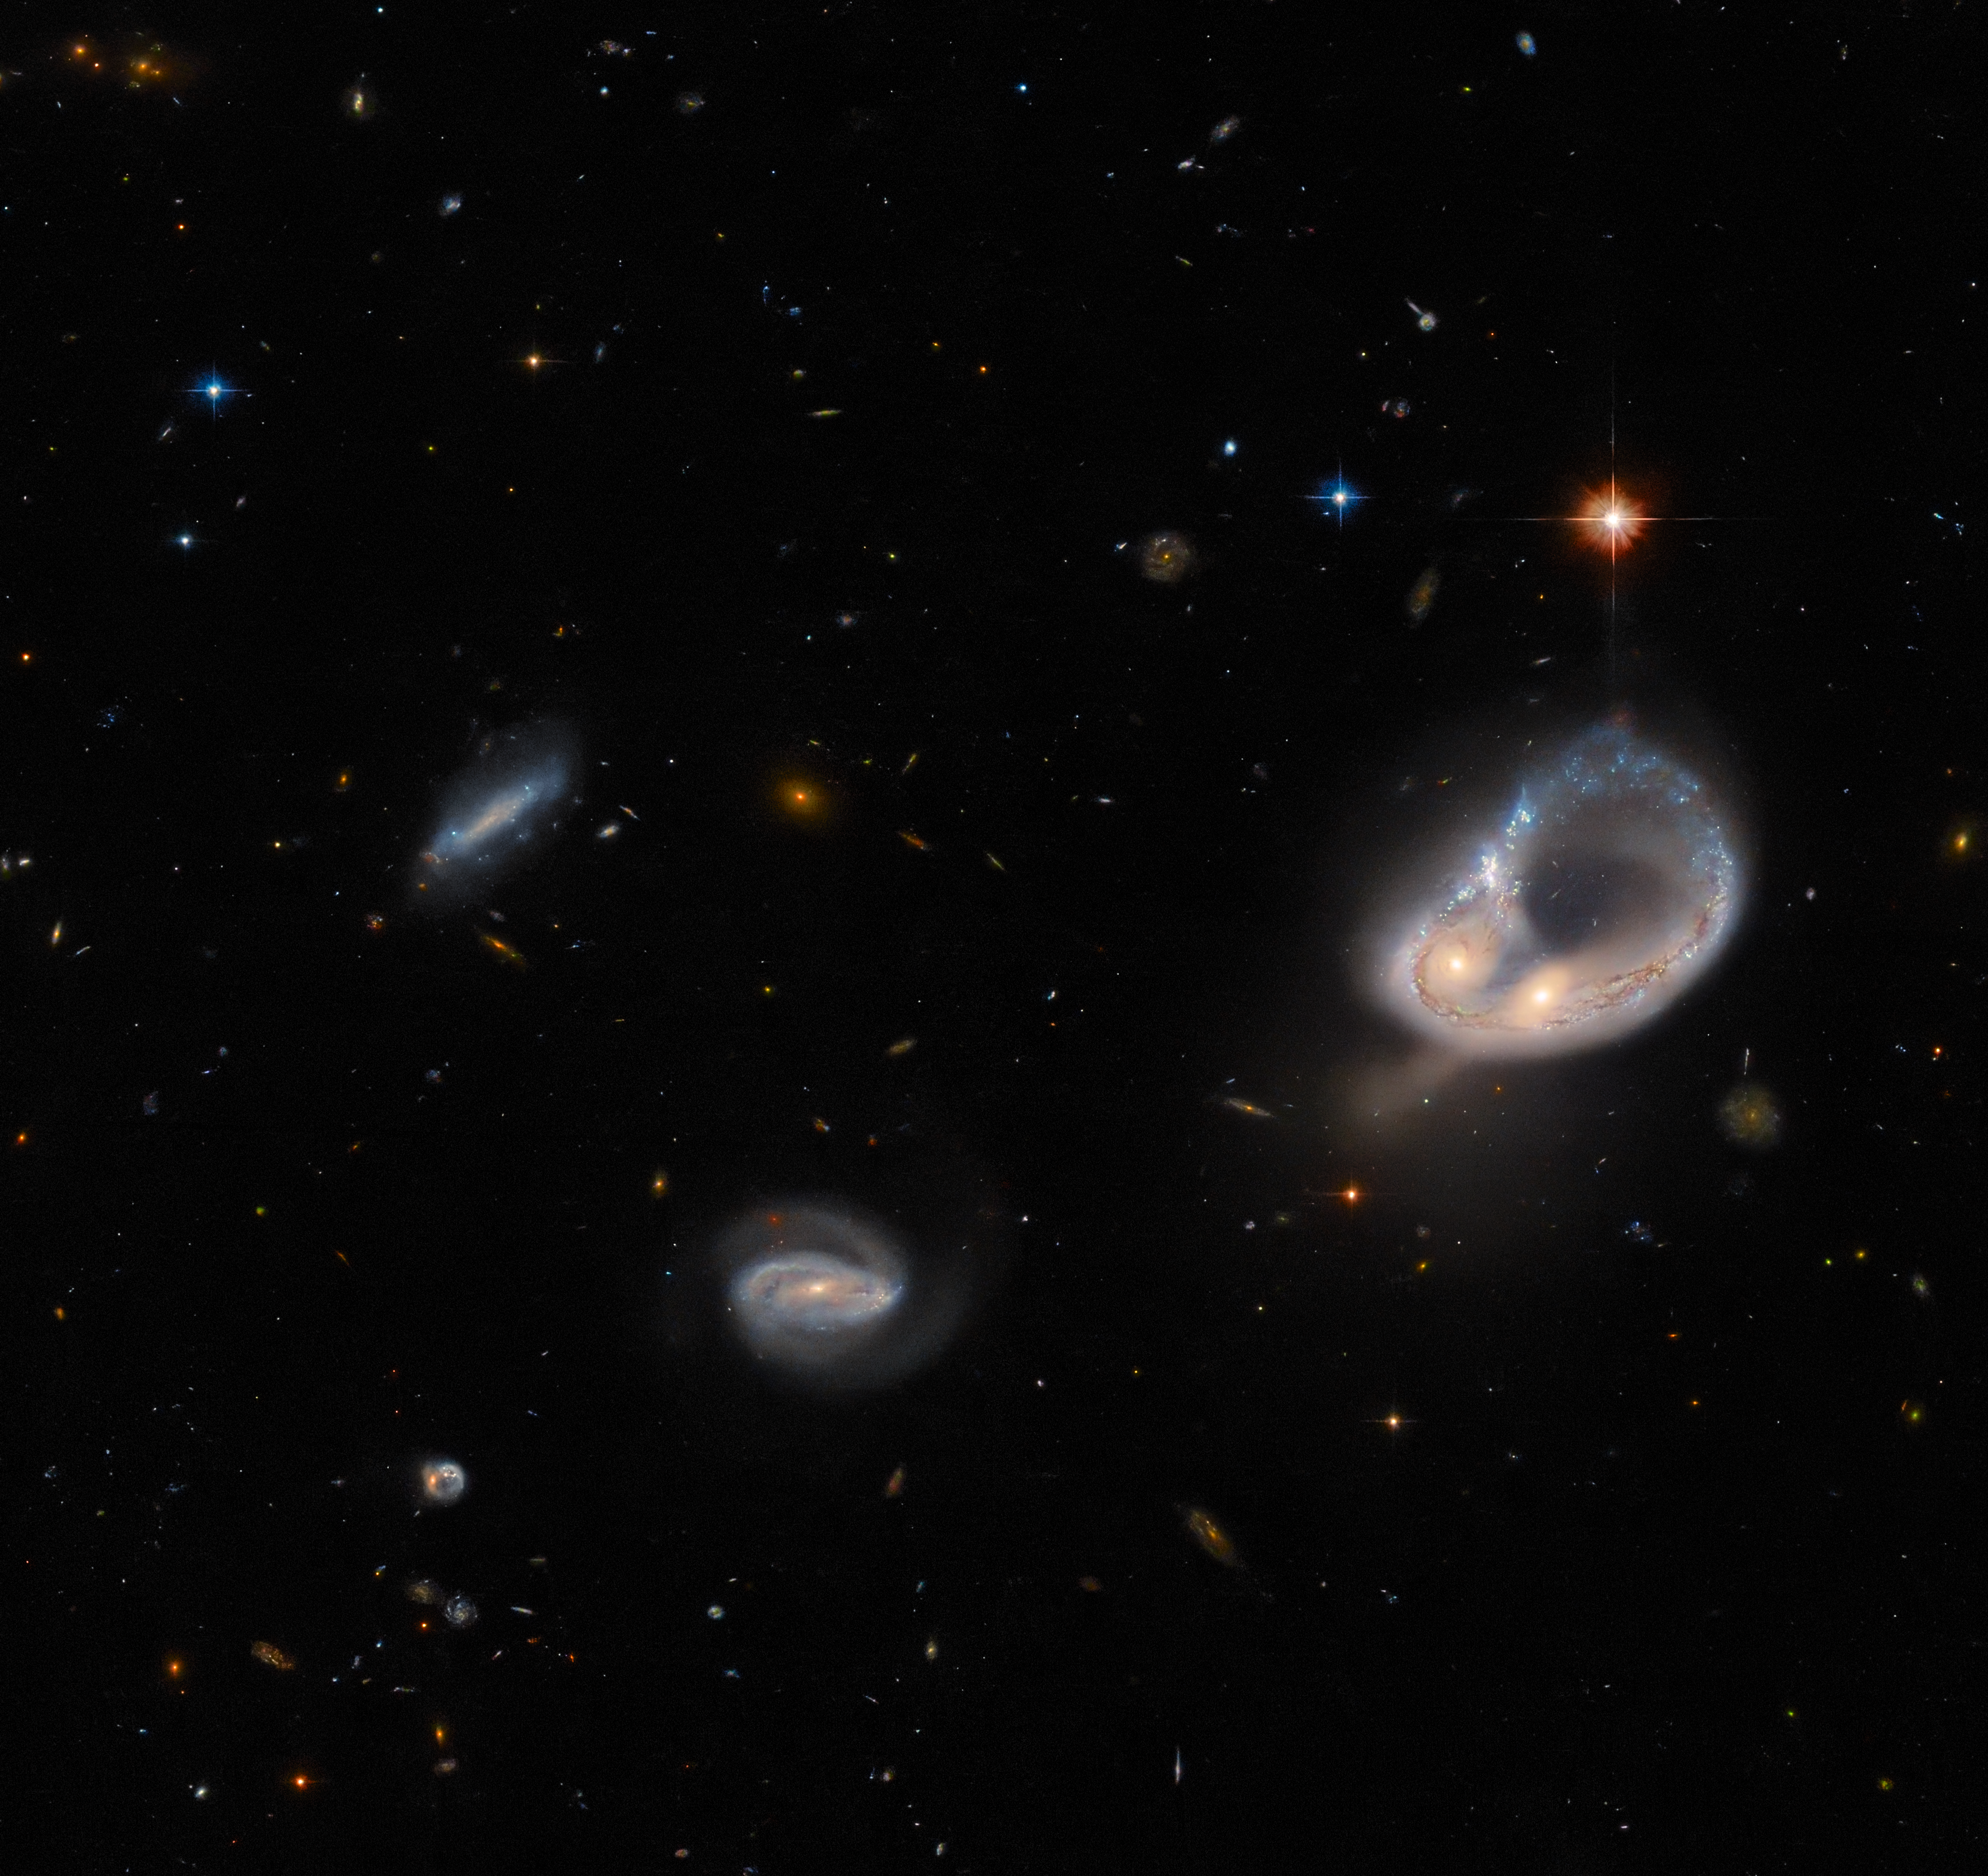

Hubble Hunts an Unusual Galaxy

The galaxy merger Arp-Madore 417-391 steals the spotlight in this image from the NASA/ESA Hubble Space Telescope. The Arp-Madore catalogue is a collection of particularly peculiar galaxies spread throughout the southern sky, and includes a collection of subtly interacting galaxies as well as more spectacular colliding galaxies. Arp-Madore 417-391, which lies around 670 million light-years away in the constellation Eridanus in the southern celestial hemisphere, is one such galactic collision. The two galaxies have been distorted by gravity and twisted into a colossal ring, leaving the cores of the two galaxies nestled side by side.

Hubble used its Advanced Camera for Surveys (ACS) to capture this scene — the instrument is optimised to hunt for galaxies and galaxy clusters in the ancient Universe. Hubble’s ACS has been contributing to scientific discovery for 20 years, and throughout its lifetime it has been involved in everything from mapping the distribution of dark matter to studying the evolution of galaxy clusters.

This image comes from a selection of Hubble observations designed to create a list of intriguing targets for follow-up observations with the NASA/ESA/CSA James Webb Space Telescope, as well as other ground-based telescopes. Astronomers chose a list of previously unobserved galaxies for Hubble to inspect between other scheduled observations. Over time, this lets astronomers build up a menagerie of interesting galaxies while using Hubble’s limited observing time as fully as possible.

Credit: ESA/Hubble & NASA, Dark Energy Survey/DOE/FNAL/DECam/CTIO/NOIRLab/NSF/AURA, J. Dalcanton